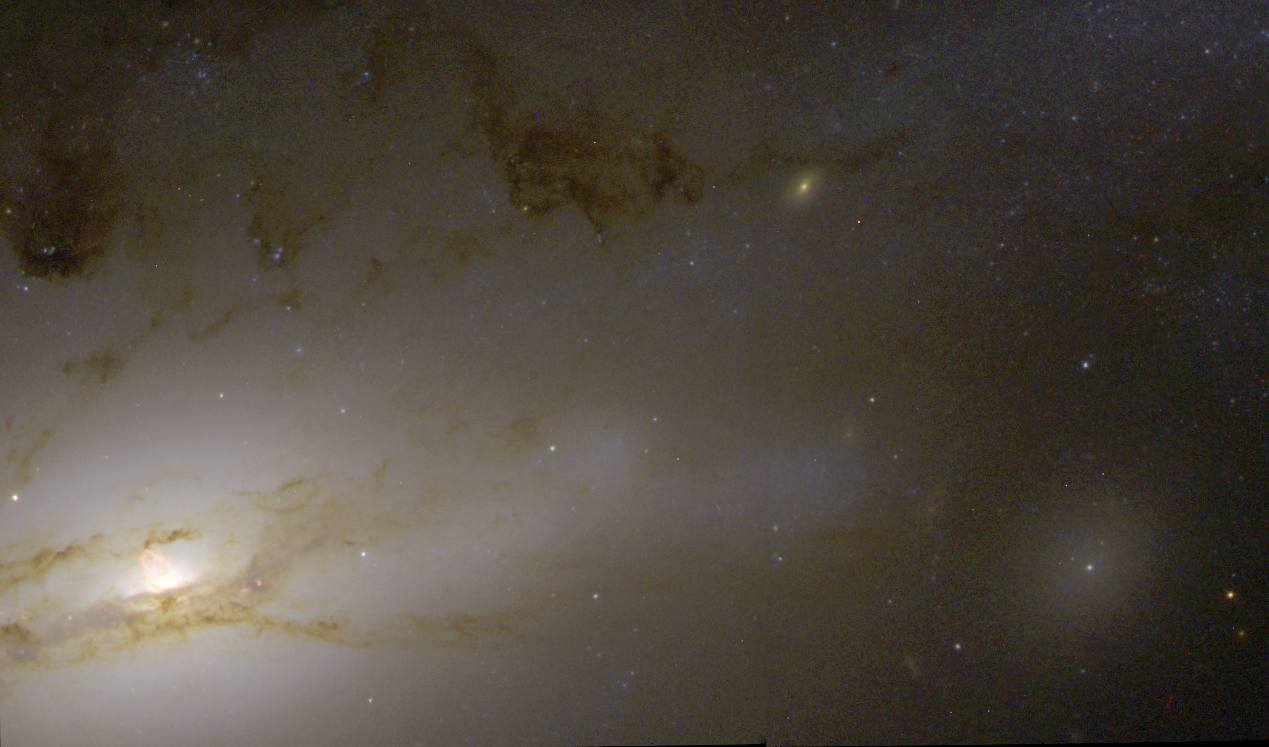

Active Galaxy NGC 4438

A monstrous black hole's rude table manners include blowing huge bubbles of hot gas into space. At least, that's the gustatory practice followed by the supermassive black hole residing in the hub of the nearby galaxy NGC 4438. Known as a peculiar galaxy because of its unusual shape, NGC 4438 is in the Virgo Cluster, 50 million light-years from Earth.

Credit: NASA/ESA, Jeffrey Kenney (Yale University), Elizabeth Yale (Yale University)